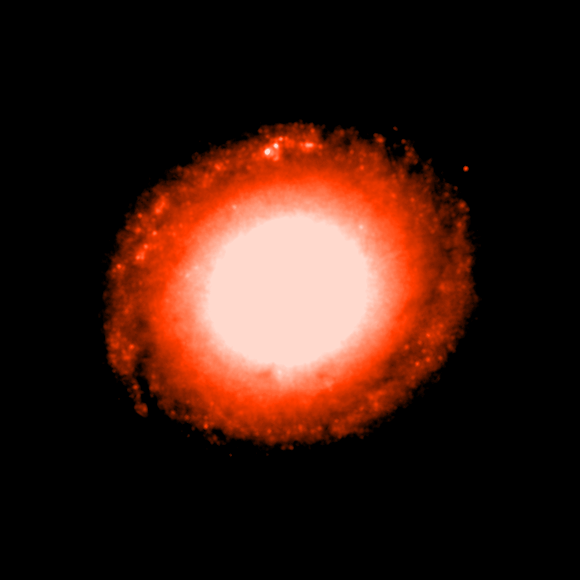

Individual colour images - 6 (NICMOS, 1600nm)

This is the sixth in a sequence of seven images which demonstrate the Hubble telescope's wavelength range, starting in the far ultraviolet and stretching all the way to the infrared.

This image was taken by the Near Infrared Camera and Multi-Object Spectrometer (NICMOS). The deeper orange colour (1600 nm) shows radiation from deeper into the infrared region of the spectrum. The image was taken on 29 July, 1998, and has an exposure time of 640 s.

This image is issued jointly by NASA and ESA.

Credit: NASA, ESA, Dan Maoz (Tel-Aviv University, Israel, and Columbia University, USA)